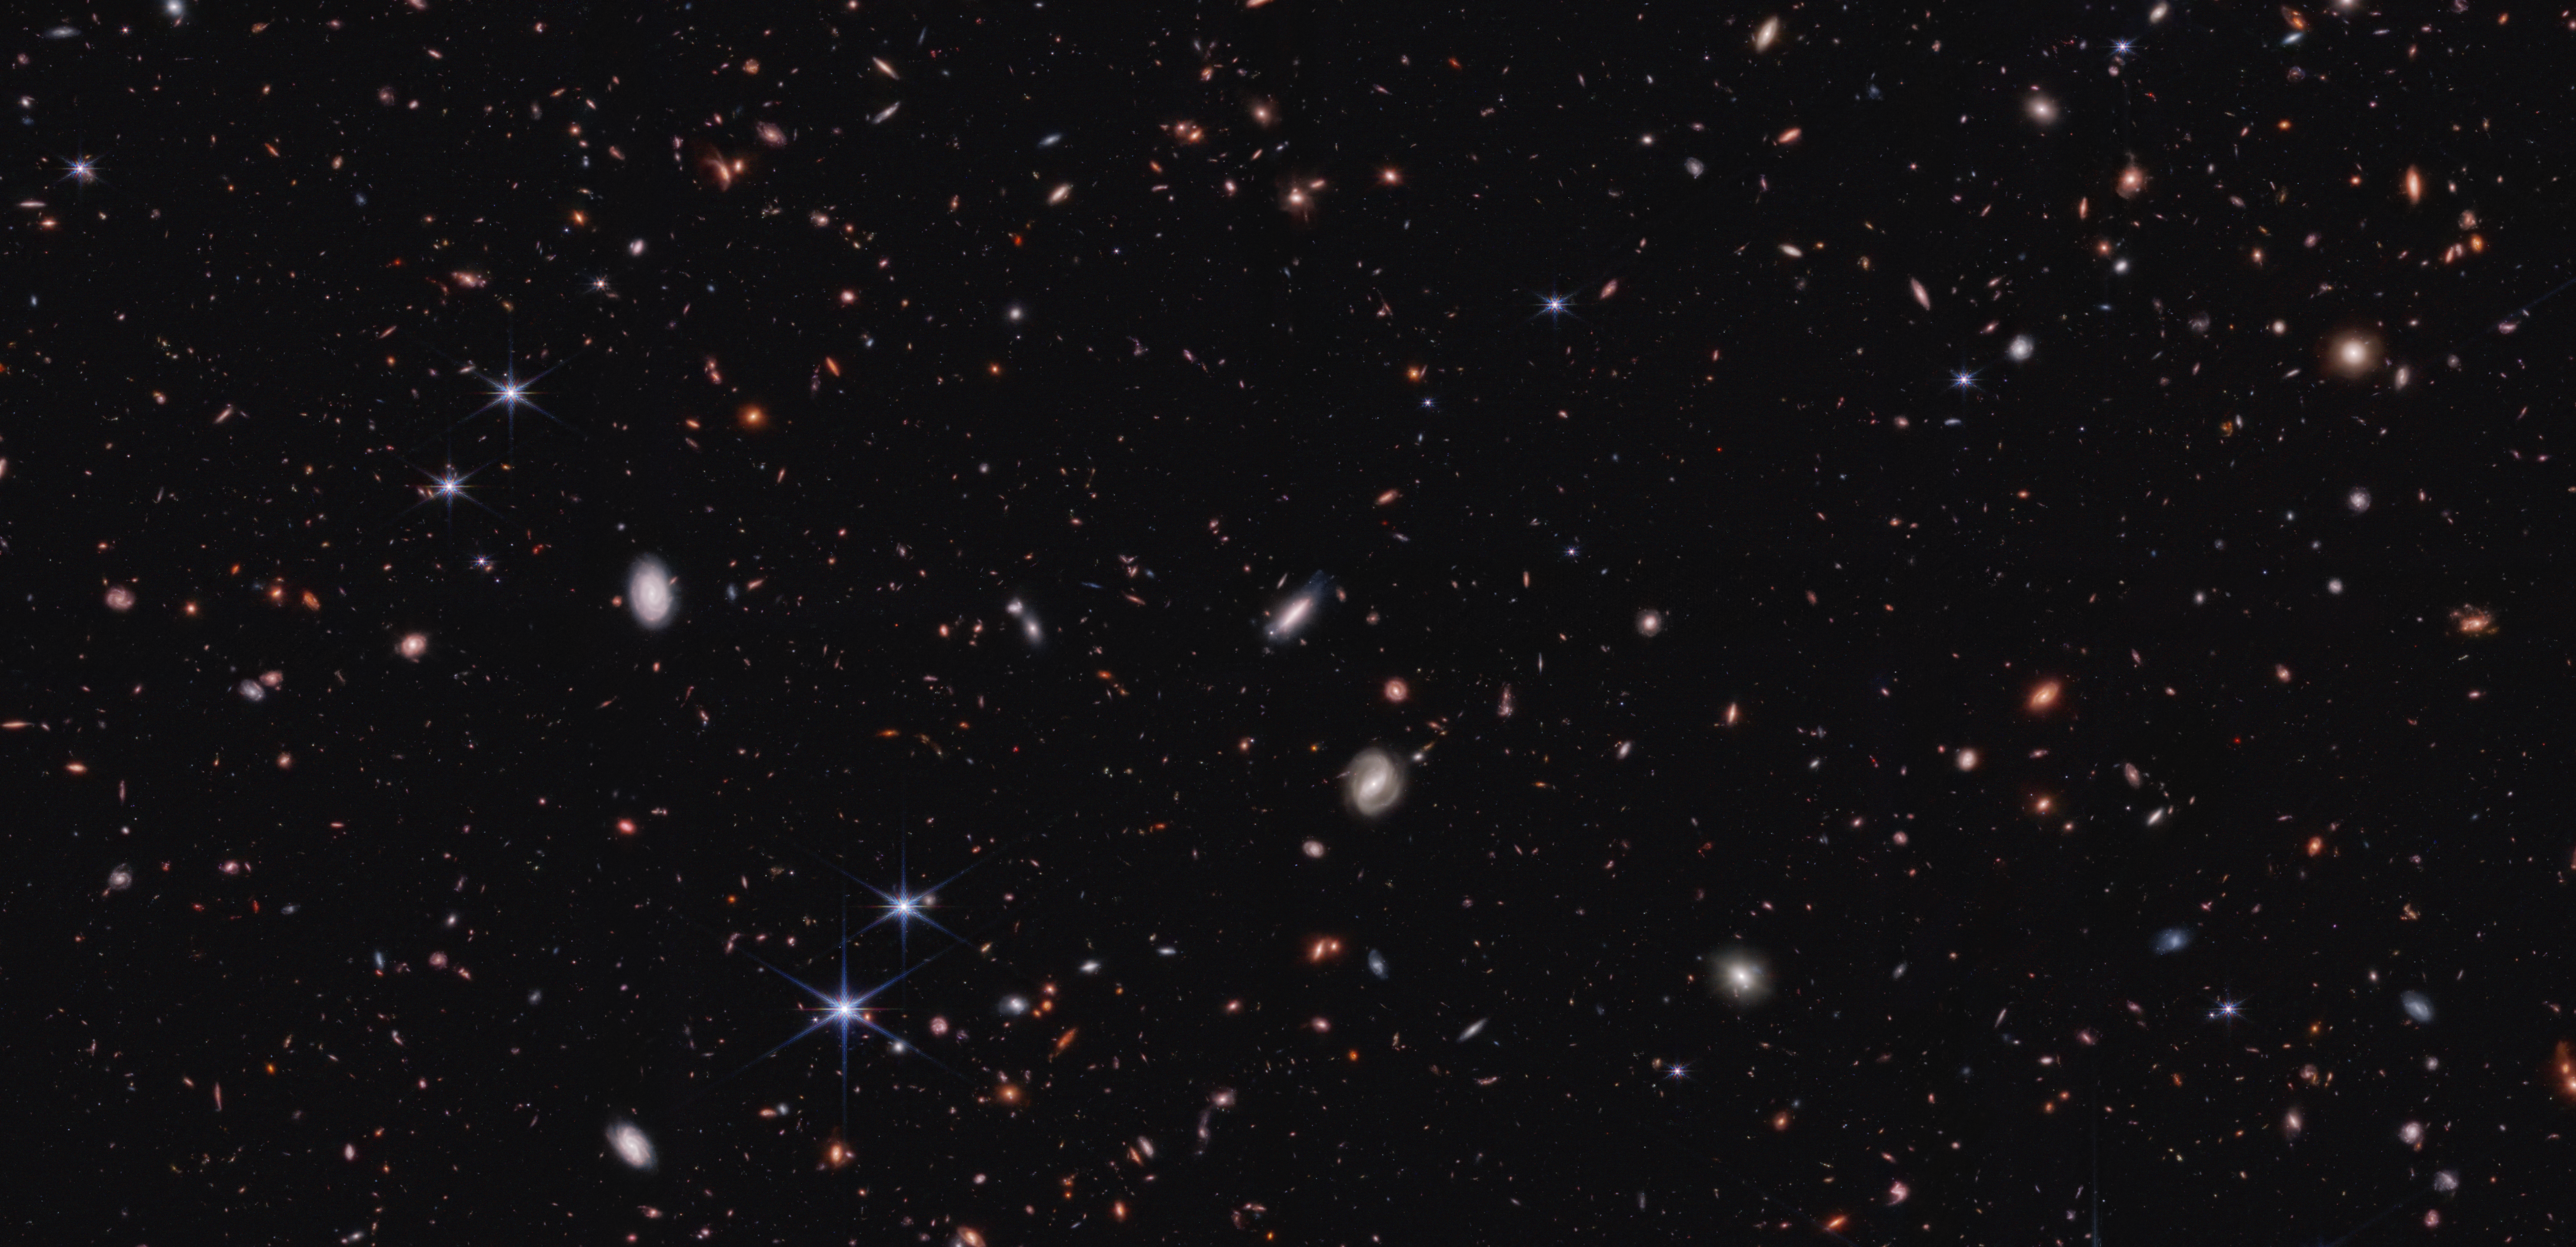

CEERS crop (NIRCam image)

When astronomers got their first glimpses of galaxies in the early Universe from the NASA/ESA/CSA James Webb Space Telescope, they were expecting to find galactic pipsqueaks, but instead they found what appeared to be a bevy of Olympic bodybuilders. Some galaxies appeared to have grown so massive, so quickly, that simulations couldn’t account for them. Some researchers suggested this meant that something might be wrong with the theory that explains what the Universe is made of and how it has evolved since the big bang, known as the standard model of cosmology.

According to a new study in the Astrophysical Journal, some of those early galaxies are in fact much less massive than they first appeared. Black holes in some of these galaxies make them appear much brighter and bigger than they really are. The evidence was provided by Webb’s Cosmic Evolution Early Release Science (CEERS) Survey.

According to this latest study, the galaxies that appeared overly massive likely host black holes rapidly consuming gas. Friction in the fast-moving gas emits heat and light, making these galaxies much brighter than they would be if that light emanated just from stars. This extra light can make it appear that the galaxies contain many more stars, and hence are more massive, than we would otherwise estimate. When scientists remove these galaxies, dubbed “little red dots” (based on their red color and small size), from the analysis, the remaining early galaxies are not too massive to fit within predictions of the standard model.

However, there are still roughly twice as many massive galaxies in Webb’s data of the early Universe than expected from the standard model. One possible reason might be that stars formed more quickly in the early Universe than they do today. Star formation happens when hot gas cools enough to succumb to gravity and condense into one or more stars. But as the gas contracts, it heats up, generating outward pressure. In our region of the Universe, the balance of these opposing forces tends to make the star formation process very slow. But perhaps, according to some theories, because the early Universe was denser than today, it was harder to blow gas out during star formation, allowing the process to go faster.

This image shows a small portion of the field observed by NASA’s James Webb Space Telescope’s NIRCam (Near-Infrared Camera) for the CEERS survey. The light from some of them has traveled for over 13 billion years to reach the telescope. Read more about the full CEERS image here.

Credit: NASA, ESA, CSA, Steve Finkelstein (UT Austin)